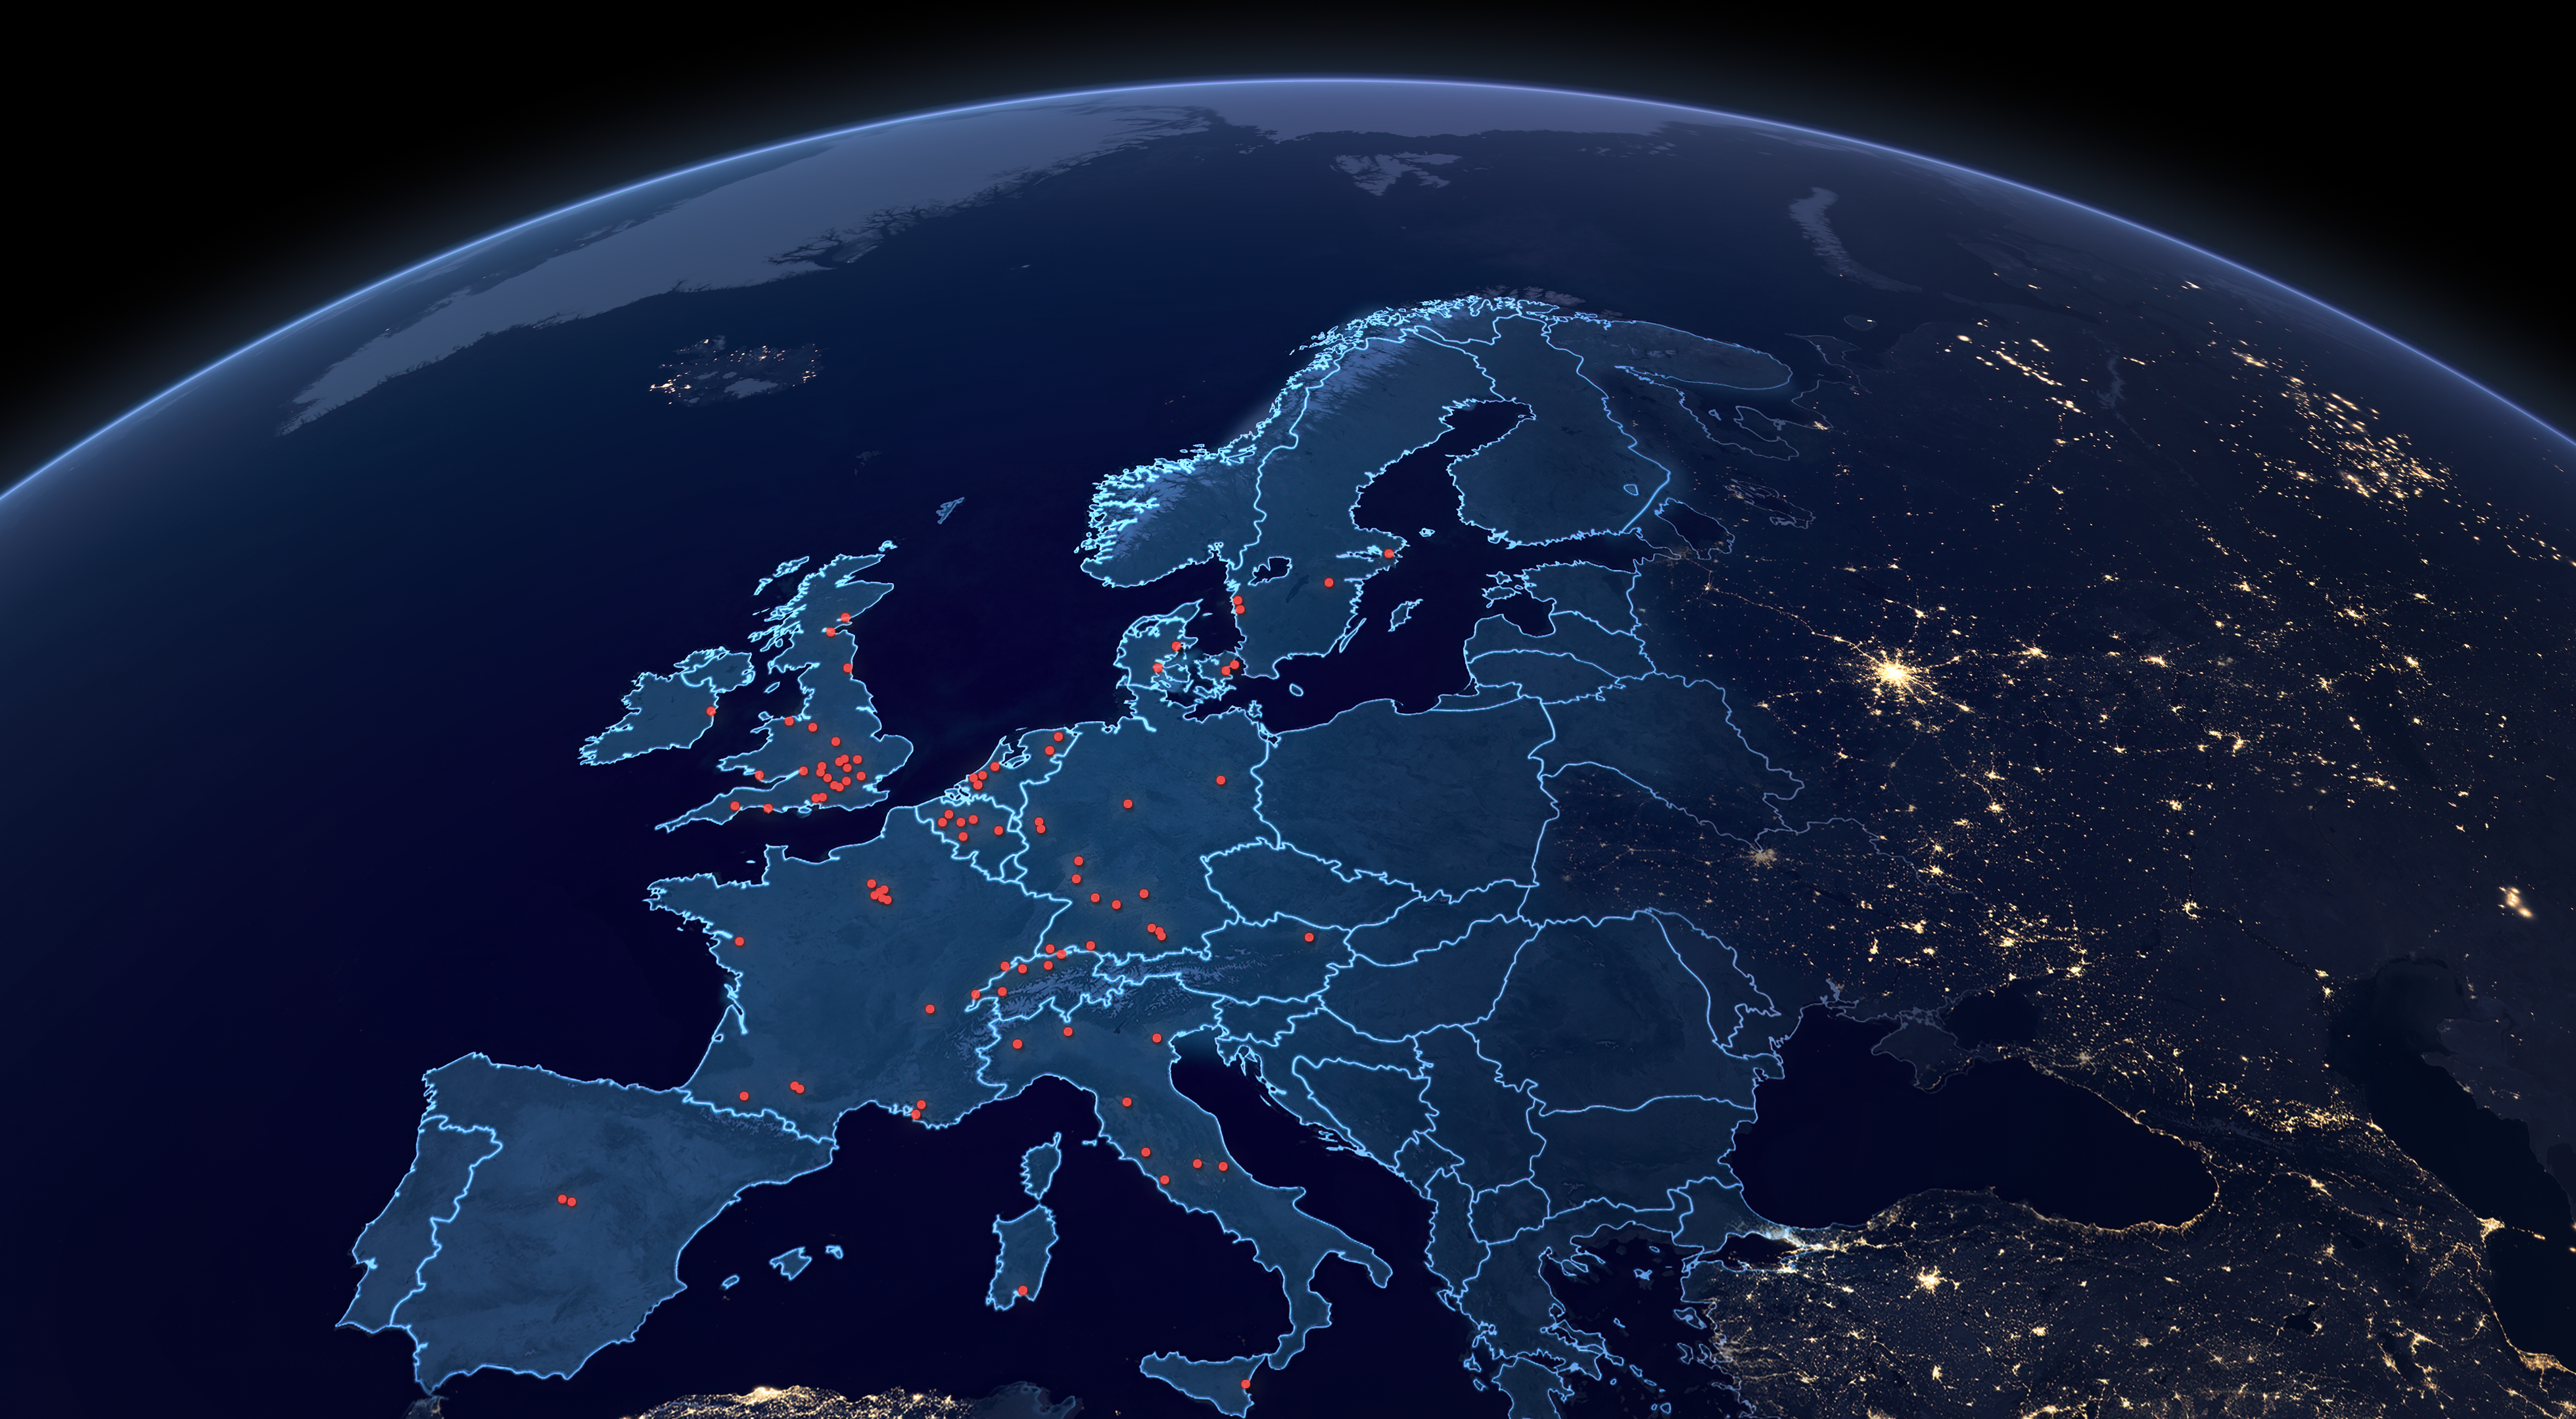

Europe’s Contribution to the James Webb Space Telescope

This map indicates the sites of various institutions and organisations that are part of ESA’s contributions and European partners to the observatory.

Credit: ESA/Hubble